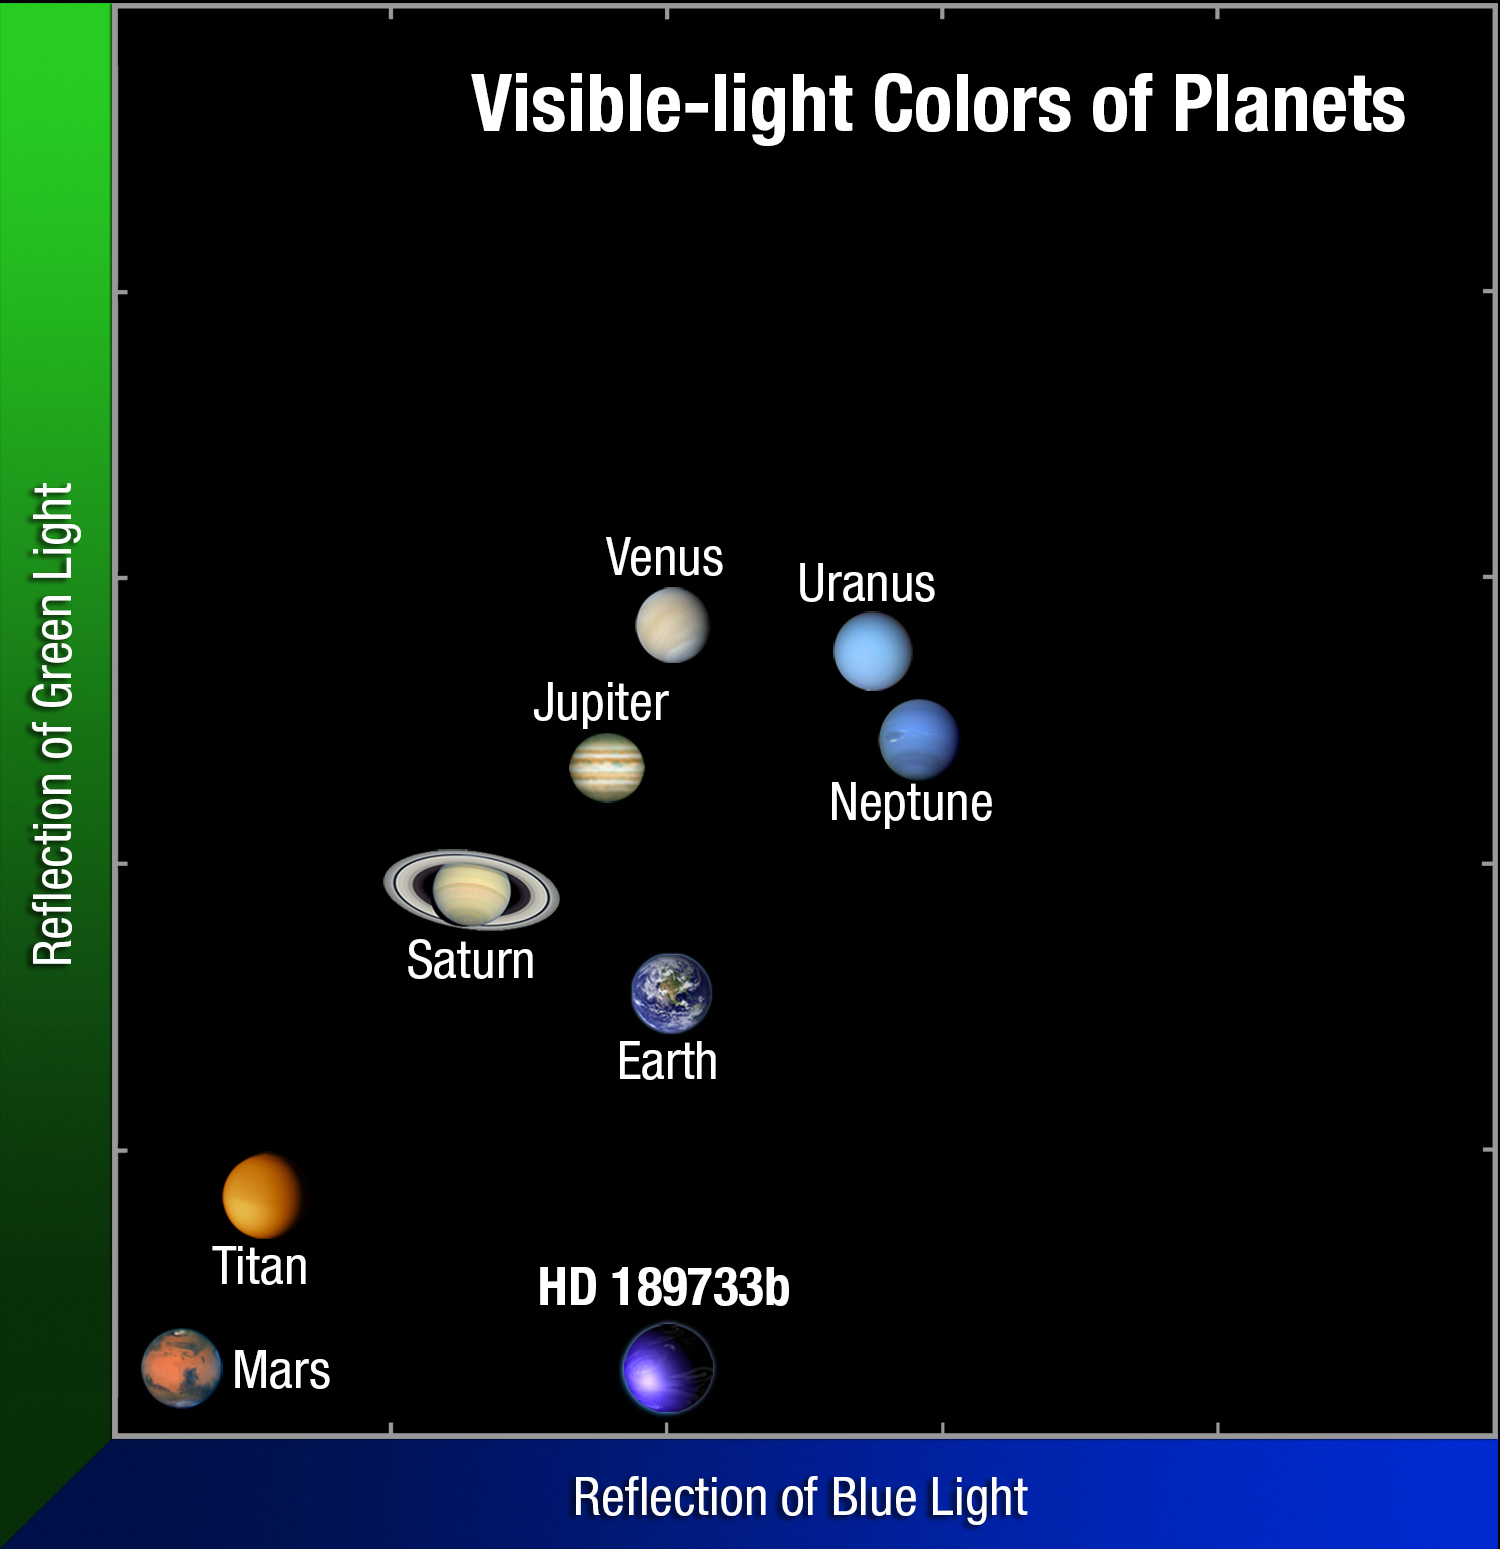

The colour of HD 189733b compared to our Solar System

This plot compares the colours of Solar System planets to the colour of the hot Jupiter HD 189733b. With the exception of Mars, the colours are primarily determined by the chemistry of the planets' atmospheres. Earth's blue atmosphere plus the blue tint of the oceans dominate our world's hue. HD 189733b's deep blue colour is produced by silicate droplets, which scatter blue light in the scorching atmosphere.

Credit: NASA, ESA, and A. Feild (STScI/AURA)